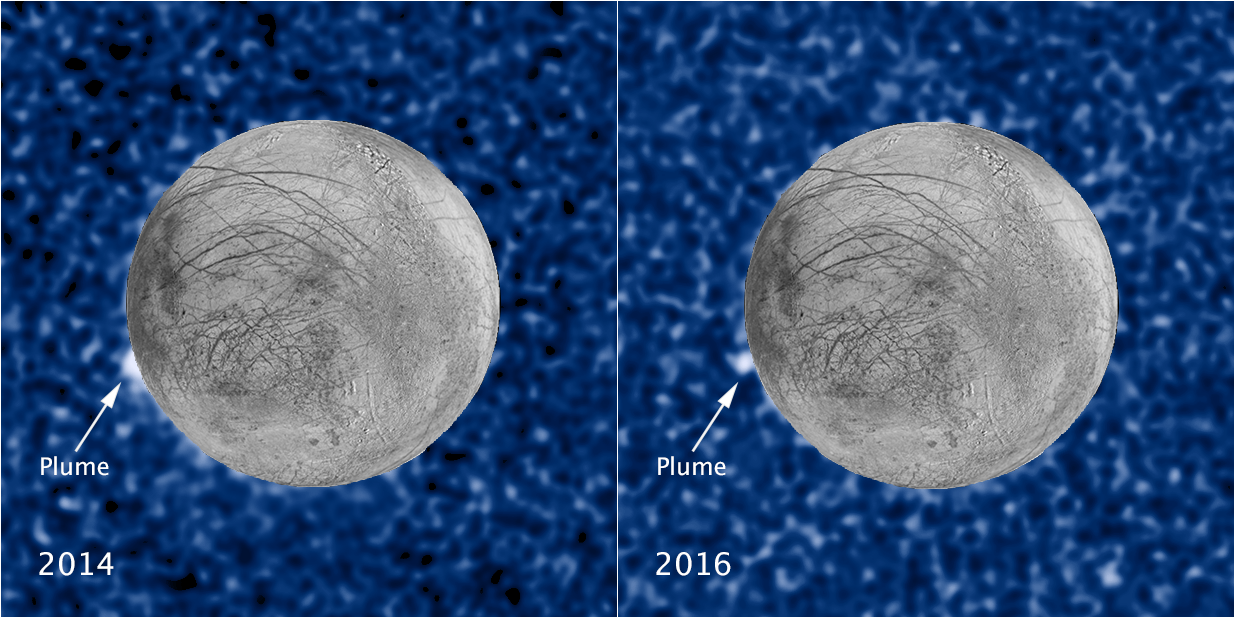

Hubble sees recurring plume erupting from Europa

These composite images show a suspected plume of material erupting two years apart from the same location on Jupiter's icy moon Europa. The images bolster evidence that the plumes are a real phenomenon, flaring up intermittently in the same region on the satellite.

Both plumes, photographed in ultraviolet light by the NASA/ESA Hubble Space Telescope, were seen in silhouette as the moon passed in front of Jupiter.

The newly imaged plume, shown at right, rises about 100 kilometres above Europa's frozen surface. The image was taken on 22 February 2016. The plume in the image at left, observed by Hubble on 17 March 2014, originates from the same location. It is estimated to be about 40 kilometres high. The snapshot of Europa, superimposed on the Hubble image, was assembled from data from NASA's Galileo mission to Jupiter.

The plumes correspond to the location of an unusually warm spot on the moon's icy crust, seen in the late 1990s by the Galileo spacecraft. Researchers speculate that this might be circumstantial evidence for water venting from the moon's subsurface. The material could be associated with the global ocean that is believed to be present beneath the frozen crust.

Credit: NASA, ESA, W. Sparks (STScI), and the USGS Astrogeology Science Center